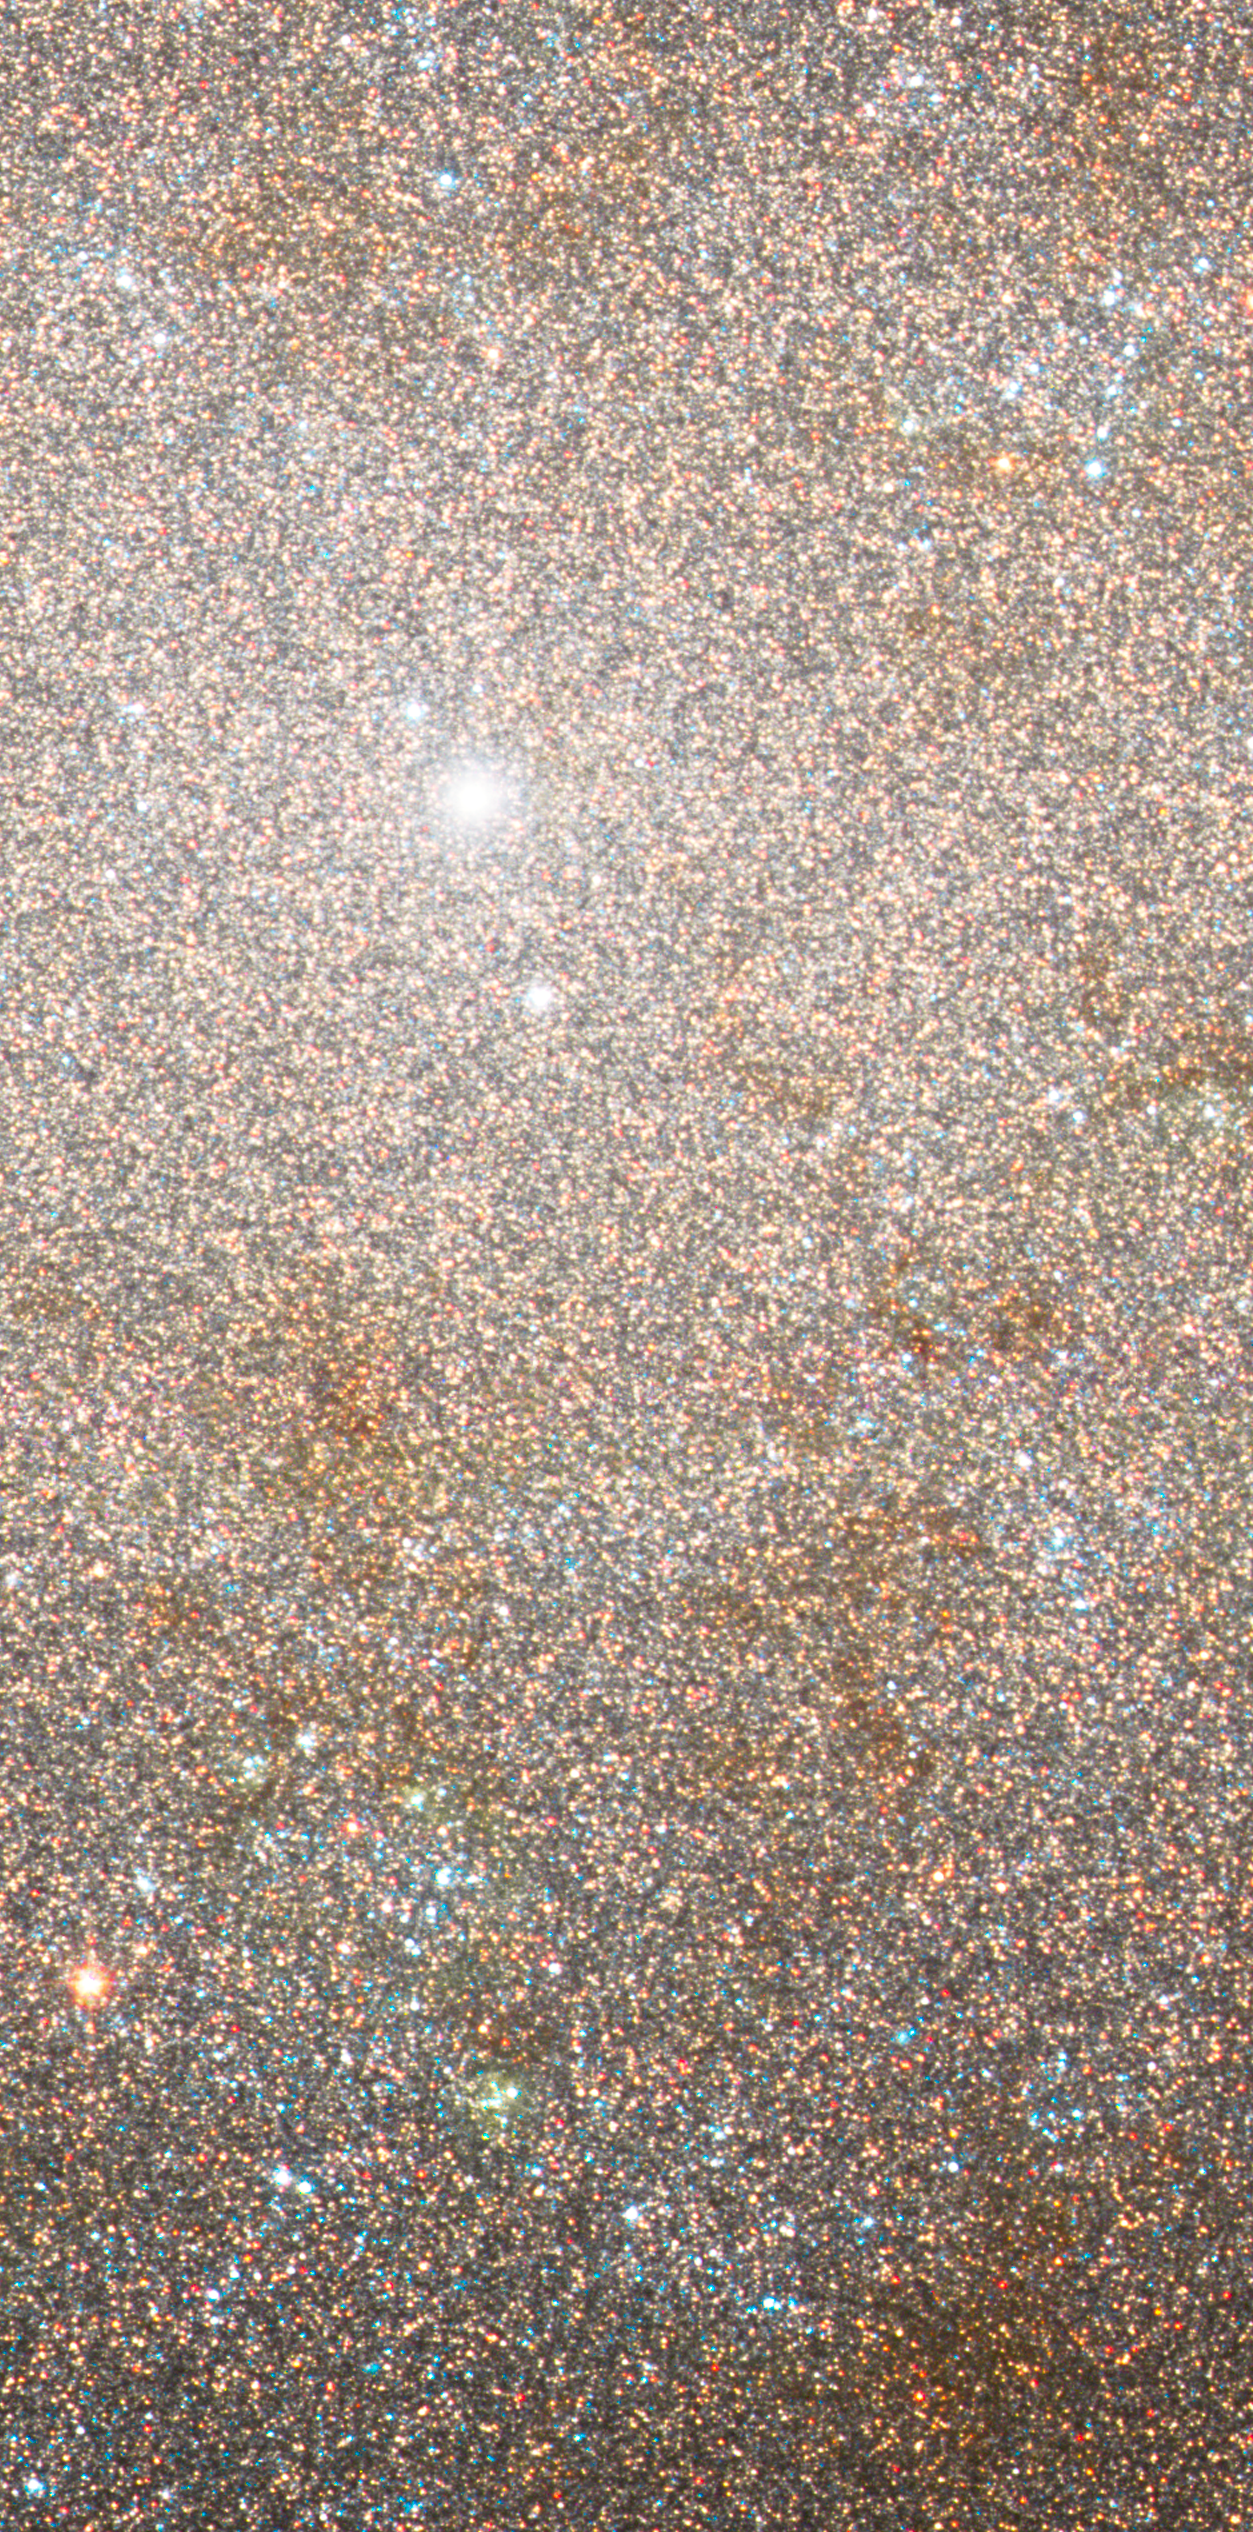

NGC 300 Detail 1

Hubble's Advanced Camera for Surveys shows individual as well as clusters of stars in the spiral galaxy NGC 300, located approximately 7 million light-years away from Earth. In this image, a dense swarm of stars, patches of dust, and a bright star cluster are visible, all located near the nucleus of the galaxy. Similar clusters are thought to be related to the formation of supermassive black holes.

Credit: NASA, ESA, J. Dalcanton and B. Williams (University of Washington)